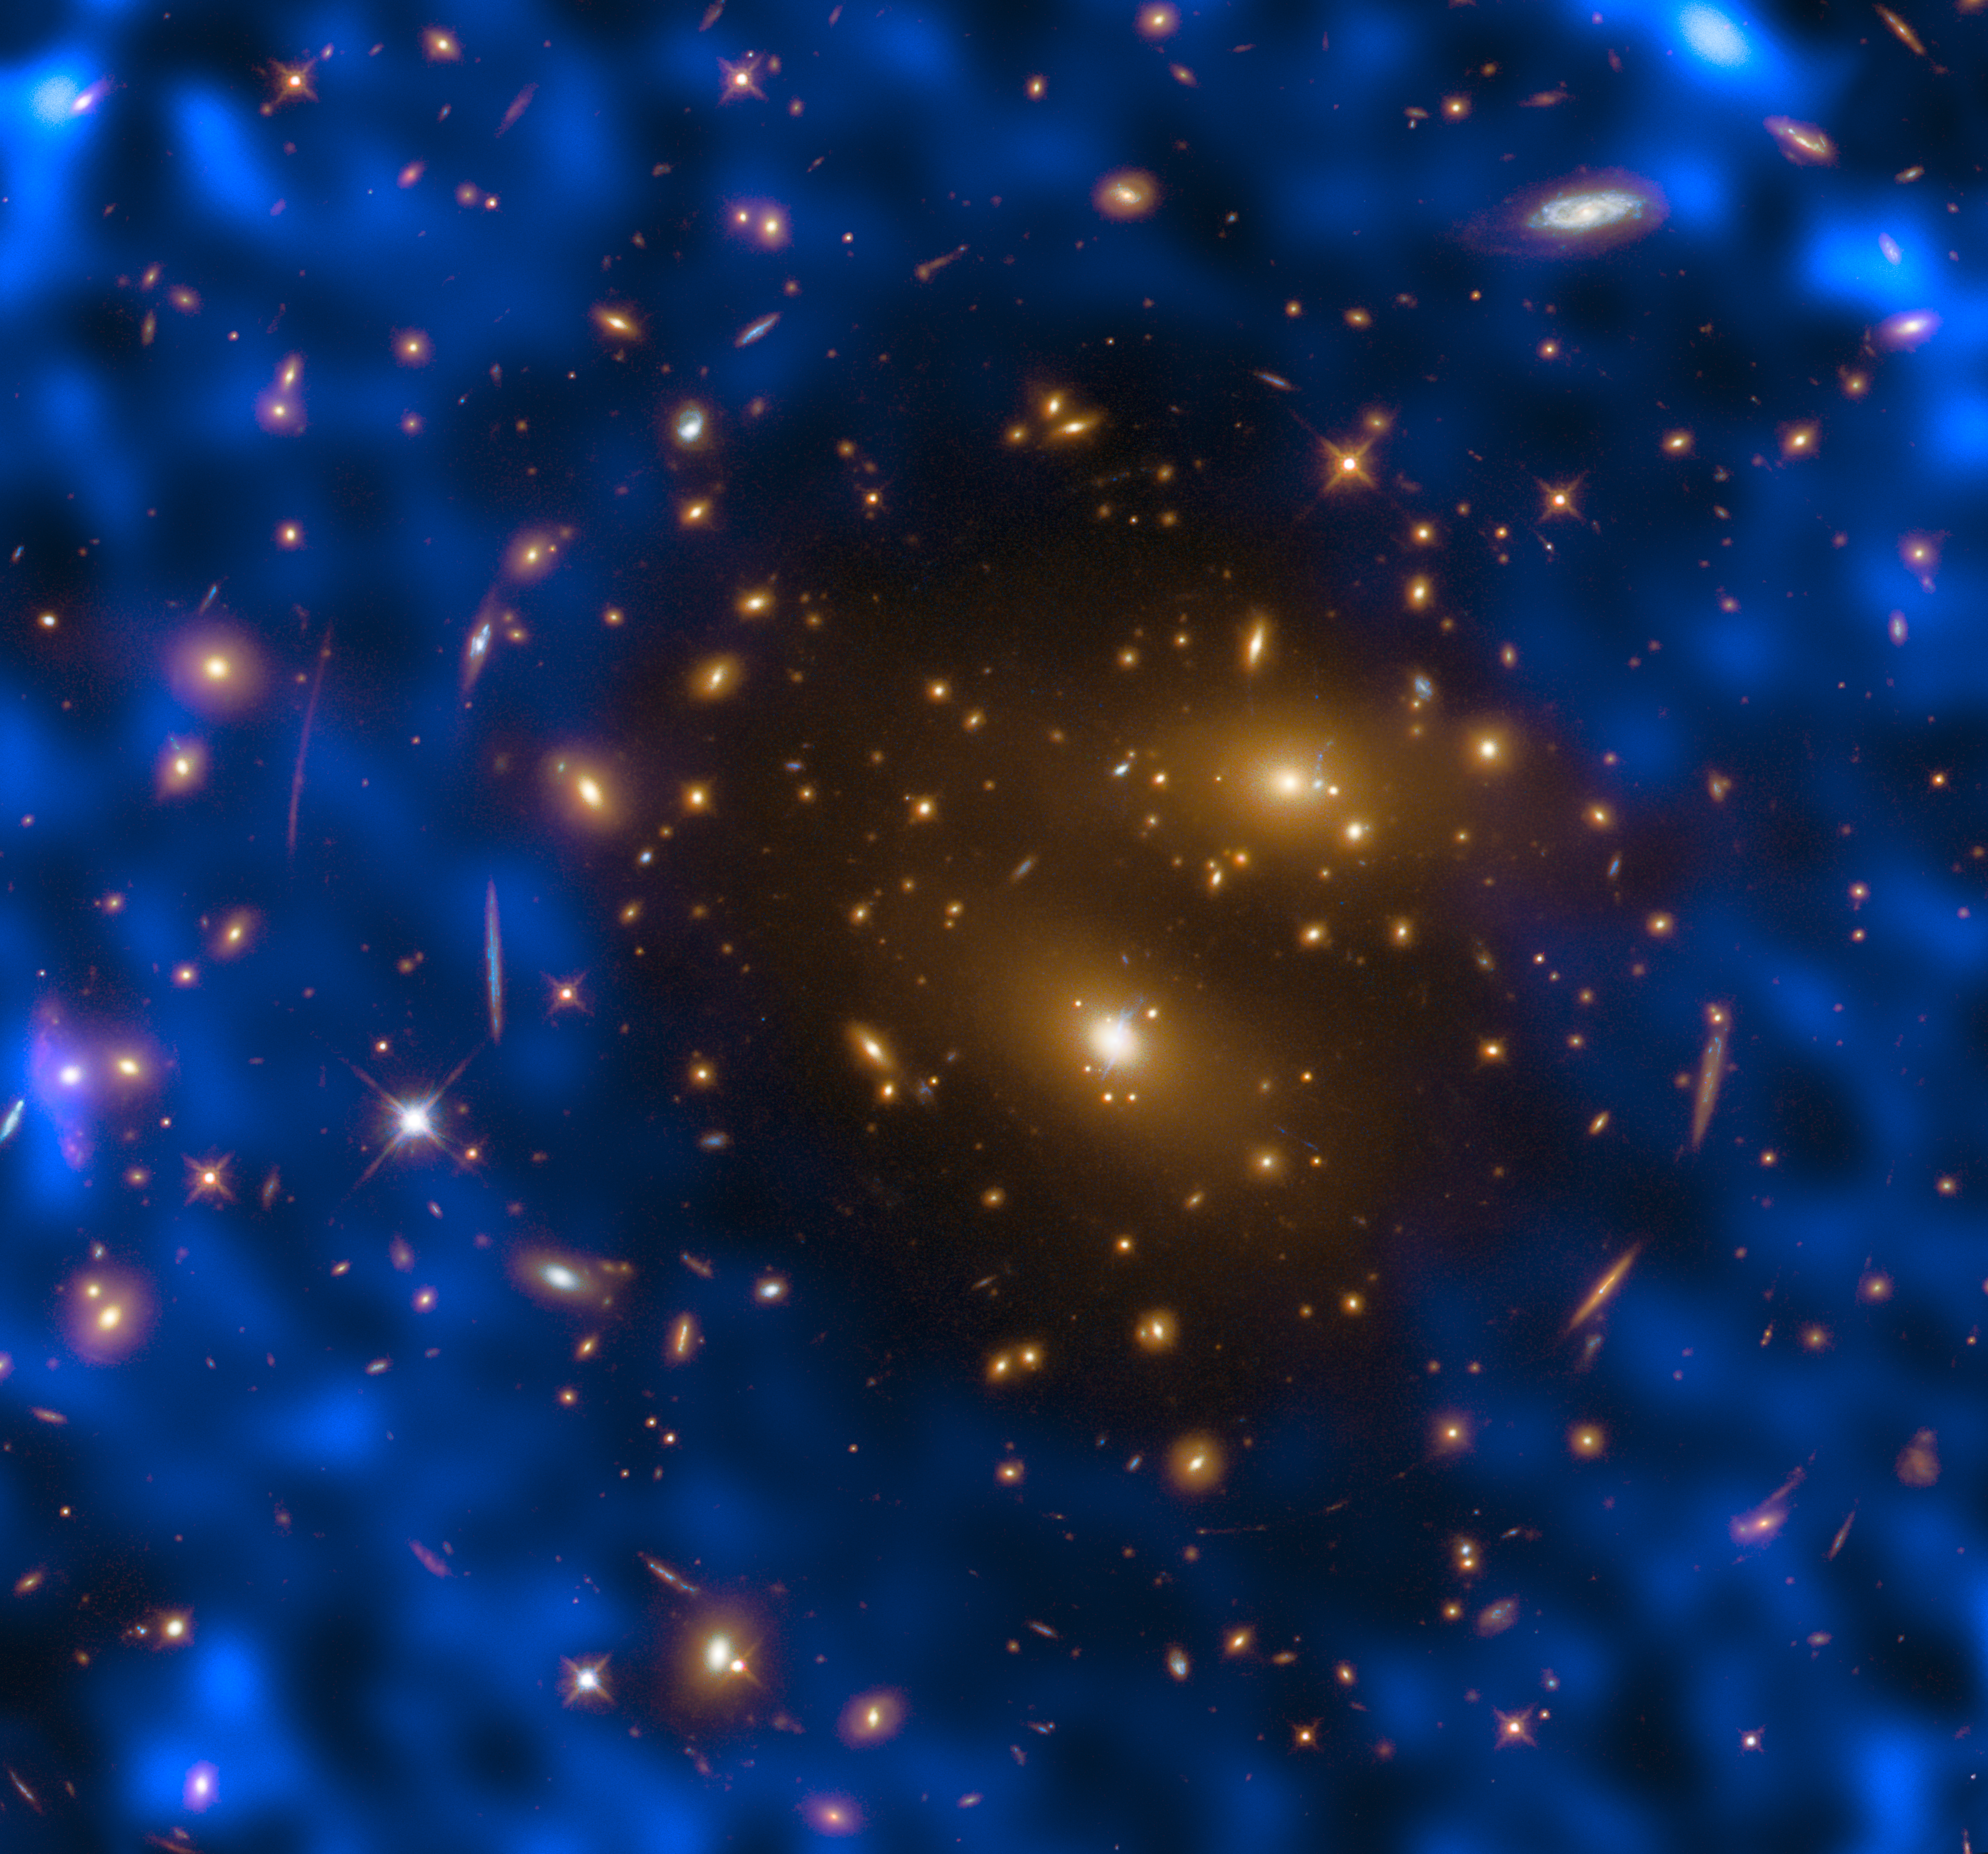

Astronomical cooperation

The events surrounding the Big Bang were so cataclysmic that they left an indelible imprint on the fabric of the cosmos. We can detect these scars today by observing the oldest light in the Universe. As it was created nearly 14 billion years ago, this light — which exists now as weak microwave radiation and is thus named the cosmic microwave background (CMB) — has now expanded to permeate the entire cosmos, filling it with detectable photons.

The CMB can be used to probe the cosmos via something known as the Sunyaev-Zel’dovich (SZ) effect, which was first observed over 30 years ago. We detect the CMB here on Earth when its constituent microwave photons travel to us through space. On their journey to us, they can pass through galaxy clusters that contain high-energy electrons. These electrons give the photons a tiny boost of energy. Detecting these boosted photons through our telescopes is challenging but important — they can help astronomers to understand some of the fundamental properties of the Universe, such as the location and distribution of dense galaxy clusters.

The NASA/ESA Hubble Space Telescope observed one of most massive known galaxy clusters, RX J1347.5–1145, seen in this Picture of the Week, as part of the Cluster Lensing And Supernova survey with Hubble (CLASH). This observation of the cluster, 5 billion light-years from Earth, helped the Atacama Large Millimeter/submillimeter Array (ALMA) in Chile to study the cosmic microwave background using the thermal Sunyaev-Zel’dovich effect. The observations made with ALMA are visible as the blue-purple hues.

Credit: ESA/Hubble & NASA, T. Kitayama (Toho University, Japan)/ESA/Hubble & NASA